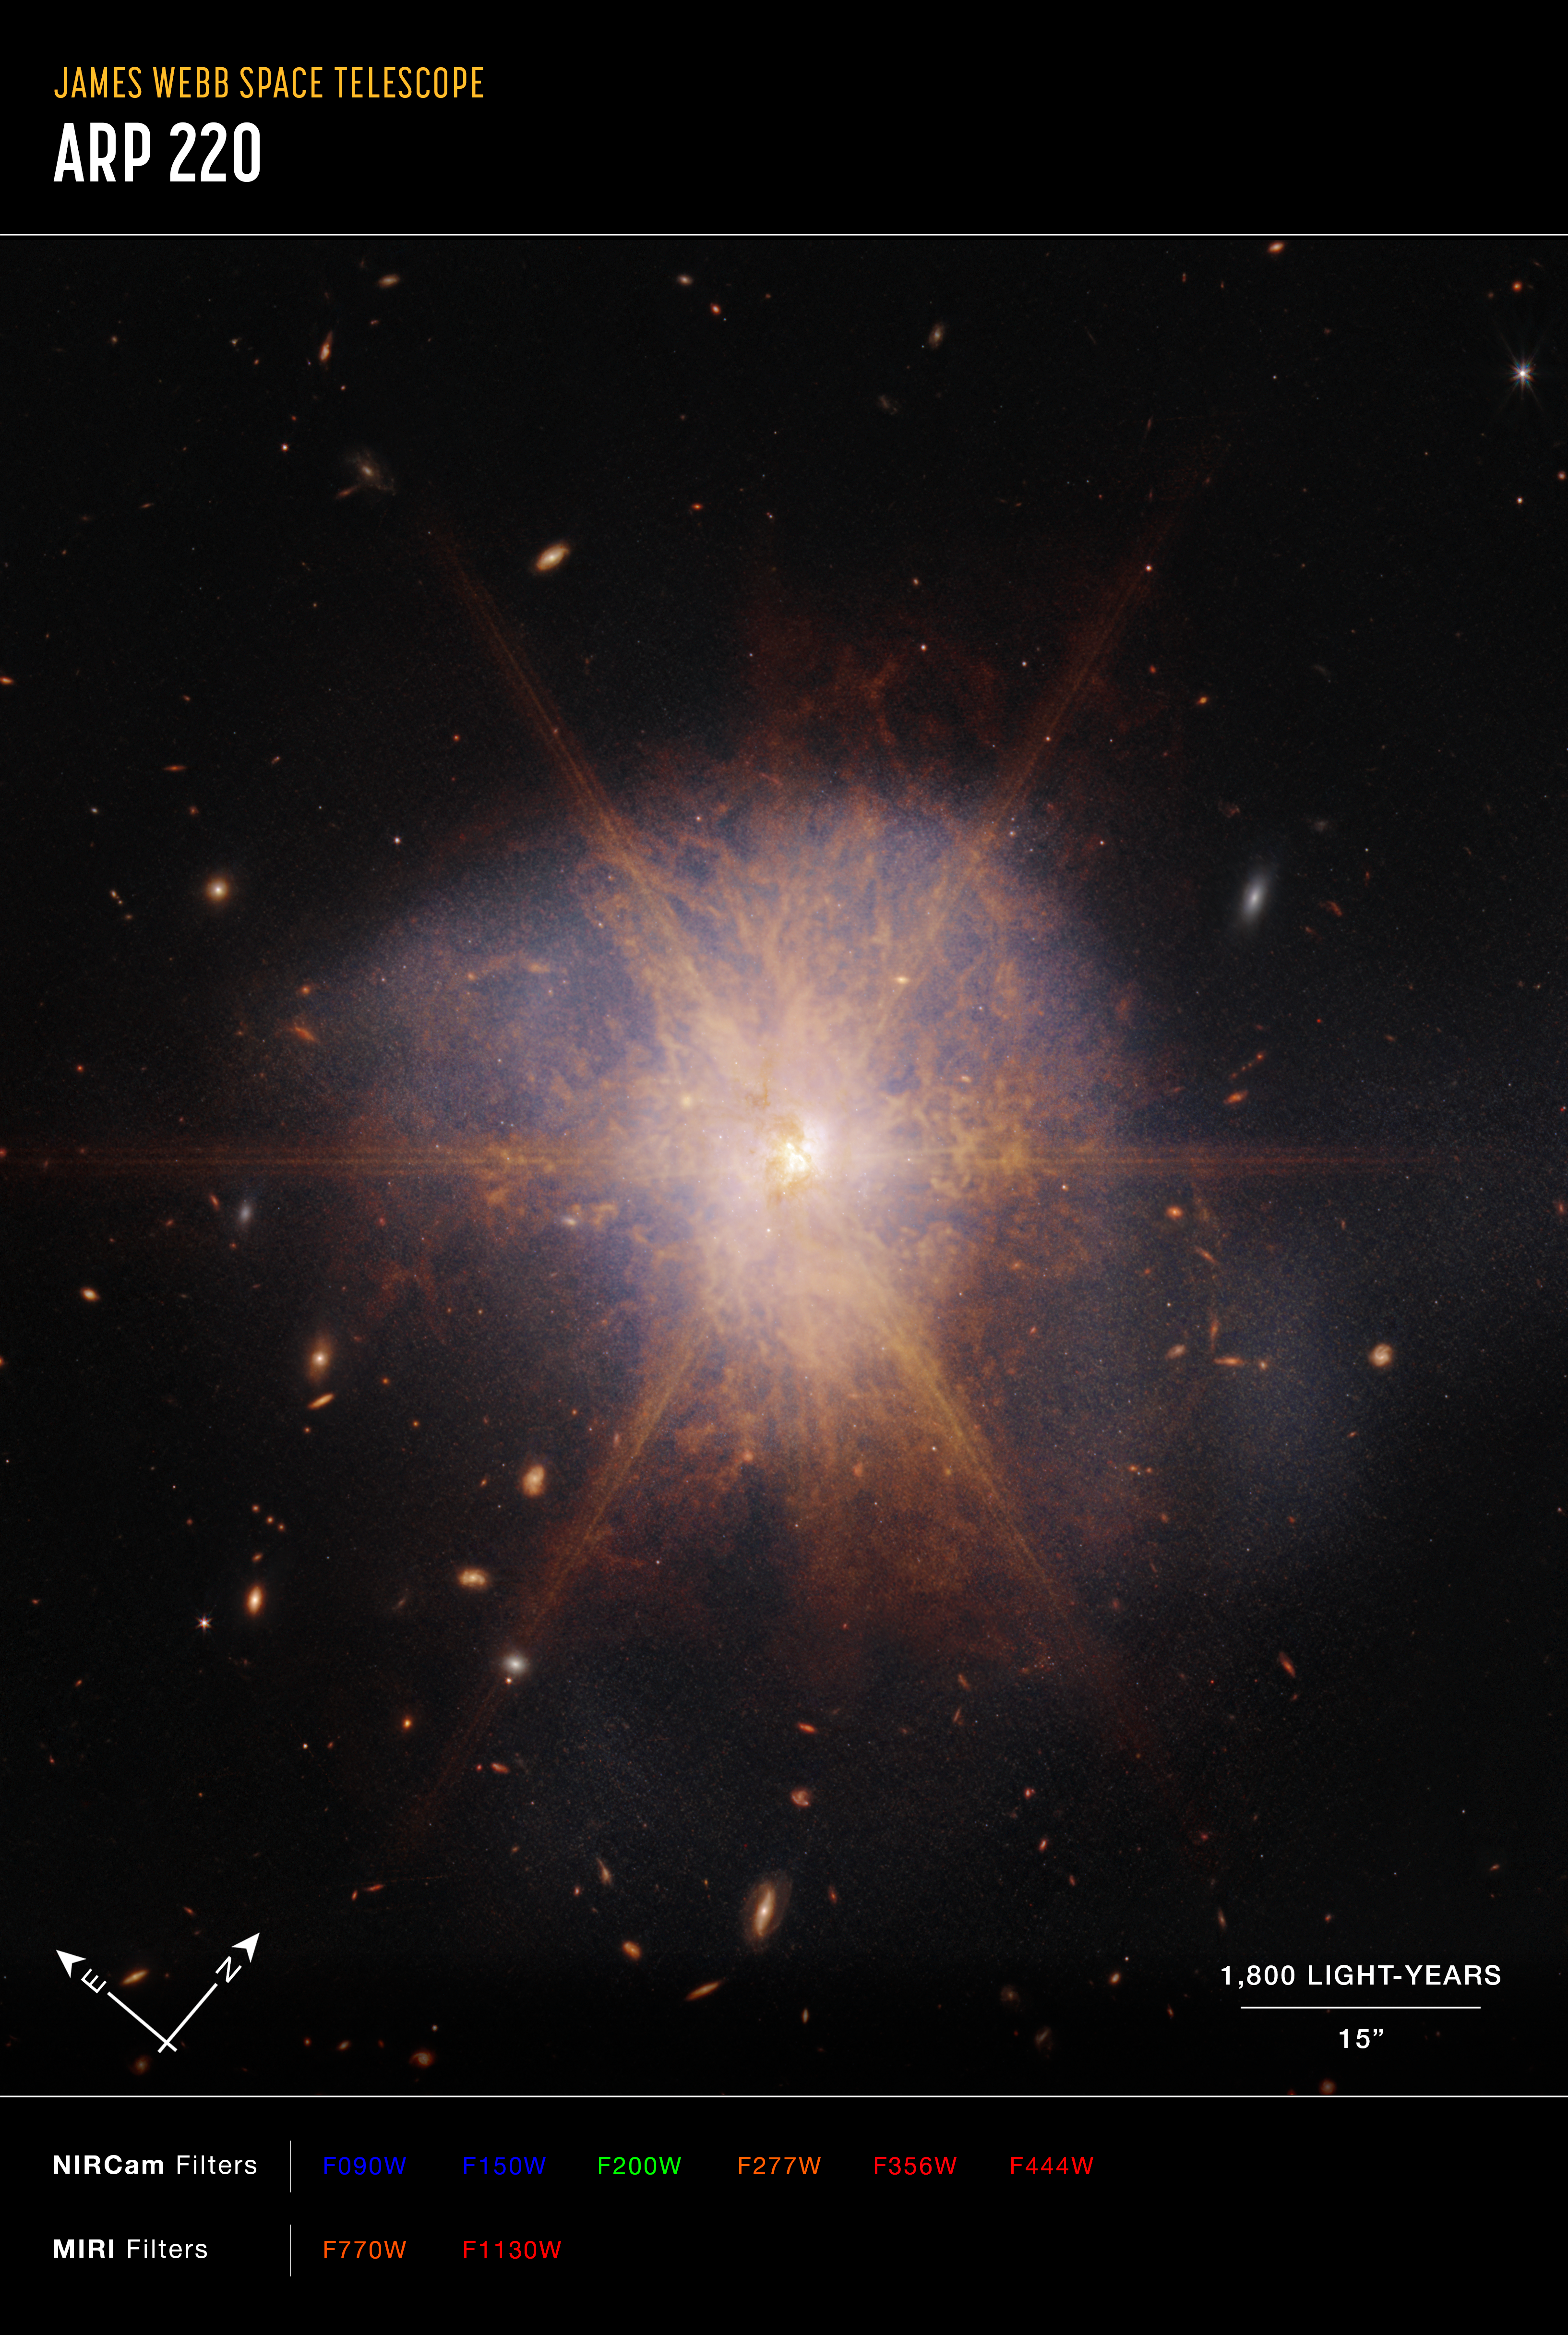

Webb captures the spectacular galactic merger Arp 220

Shining like a brilliant beacon amidst a sea of galaxies, Arp 220 lights up the night sky in this view from the NASA/ESA/CSA James Webb Space Telescope. Actually two spiral galaxies in the process of merging, Arp 220 glows brightest in infrared light, making it an ideal target for Webb. It is an ultra-luminous infrared galaxy (ULIRG) with a luminosity of more than a trillion suns. In comparison, our Milky Way galaxy has a much more modest luminosity of about ten billion suns.

Located 250 million light-years away in the constellation of Serpens, the Serpent, Arp 220 is the 220th object in Halton Arp’s Atlas of Peculiar Galaxies. It is the nearest ULIRG and the brightest of the three galactic mergers closest to Earth.

The collision of the two spiral galaxies began about 700 million years ago. It sparked an enormous burst of star formation. About 200 huge star clusters reside in a packed, dusty region about 5,000 light-years across (about 5 percent of the Milky Way’s diameter). The amount of gas in this tiny region is equal to all of the gas in the entire Milky Way galaxy.

Previous radio telescope observations revealed about 100 supernova remnants in an area of less than 500 light-years. The NASA/ESA Hubble Space Telescope uncovered the cores of the parent galaxies 1,200 light-years apart. Each of the cores has a rotating, star-forming ring blasting out the dazzling infrared light so apparent in this Webb view. This glaring light creates diffraction spikes — the starburst feature that dominates this image.

On the outskirts of this merger, Webb reveals faint tidal tails, or material drawn off the galaxies by gravity, represented in blue — evidence of the galactic dance that is occurring. Organic material represented in reddish-orange appears in streams and filaments across Arp 220.

Webb viewed Arp 220 with its Near-Infrared Camera (NIRCam) and Mid-Infrared Instrument (MIRI).

Credit: NASA, ESA, CSA, K. Pontoppidan (STScI), A. Pagan (STScI)